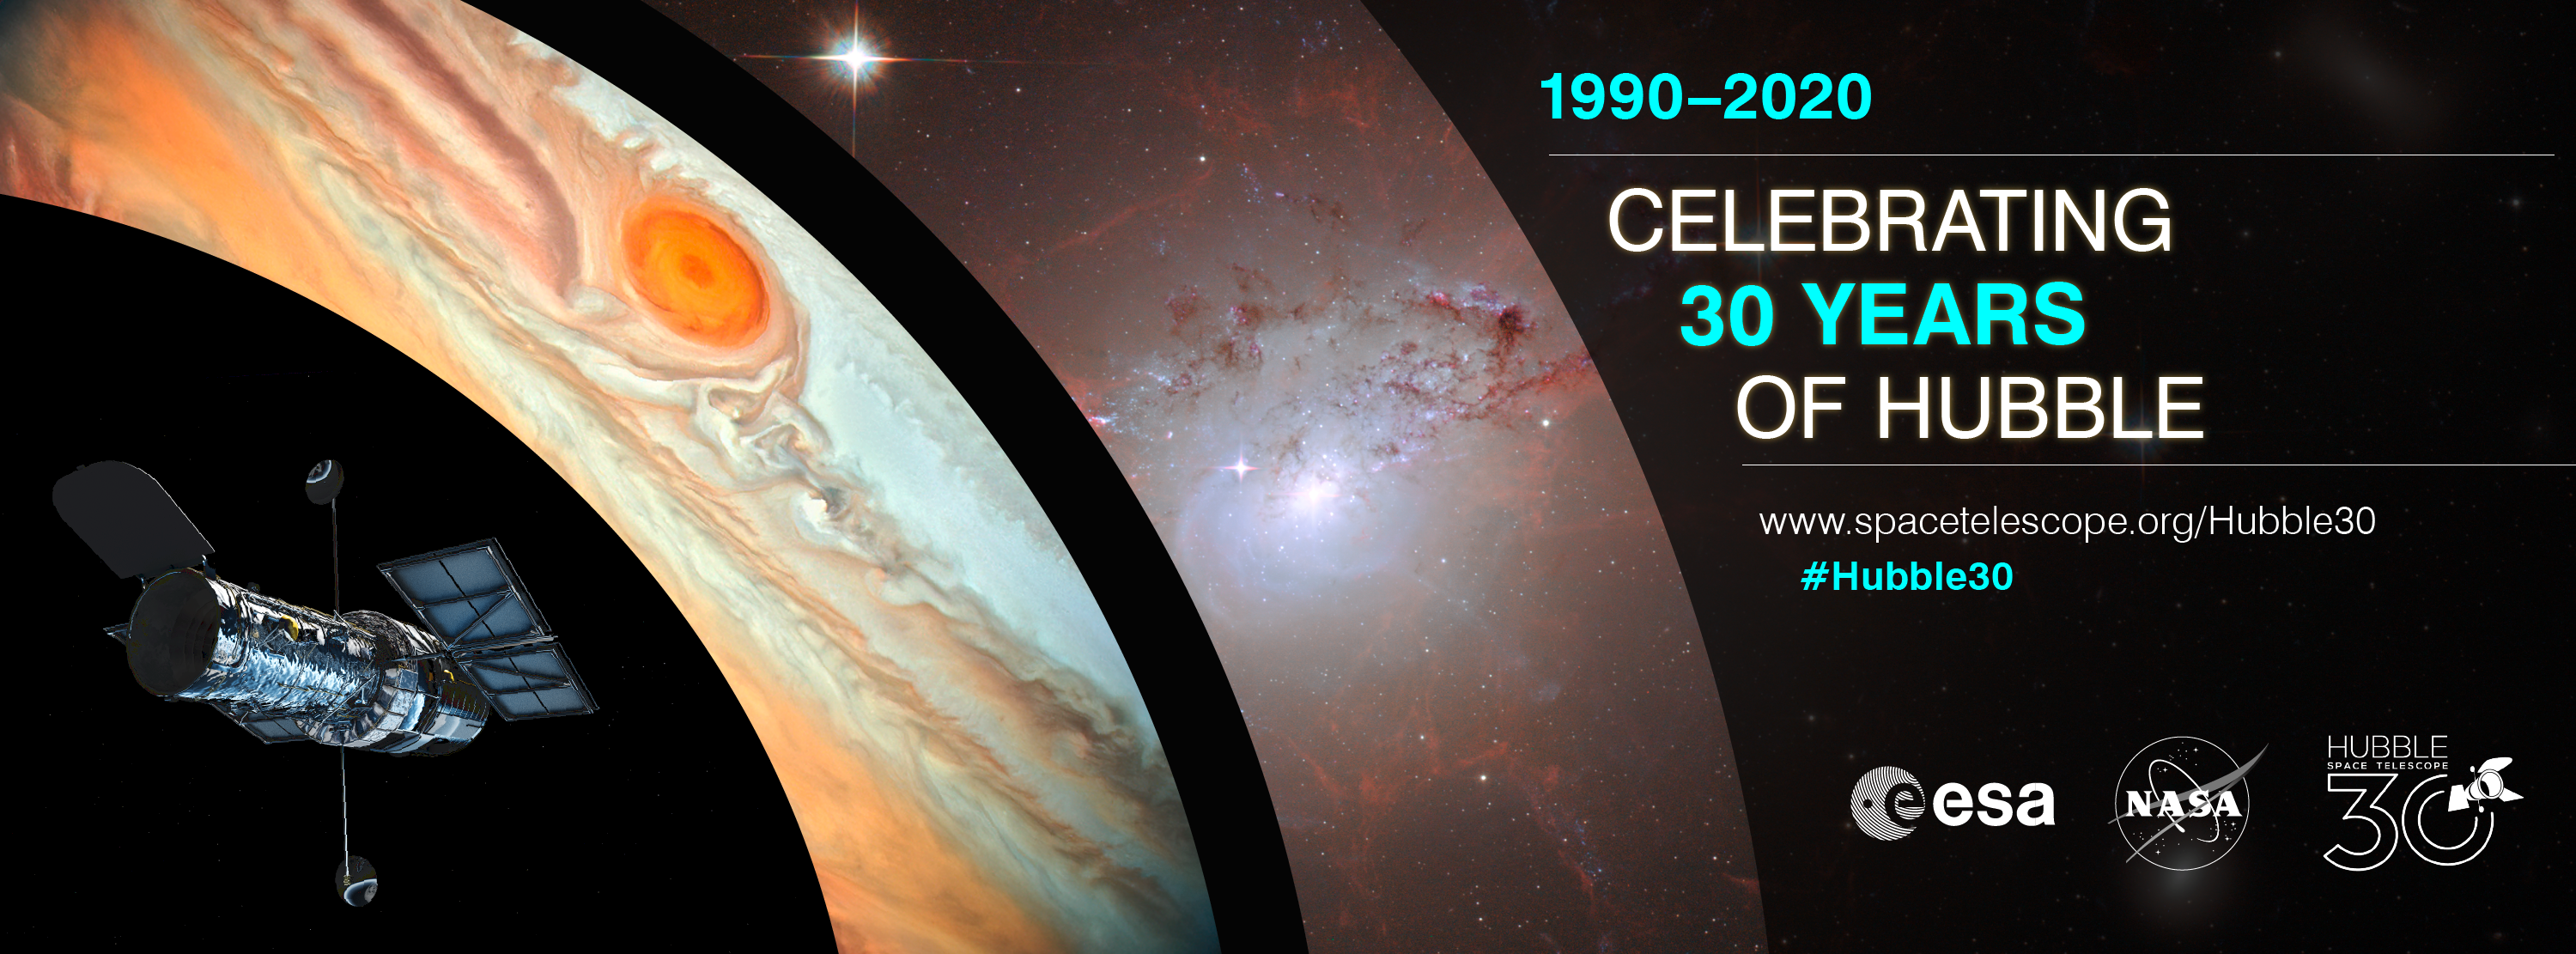

Hubble 30th anniversary

This graphic advertises the 30th anniversary of Hubble.

To find out more visit the anniversary webpage.

Credit: NASA, ESA